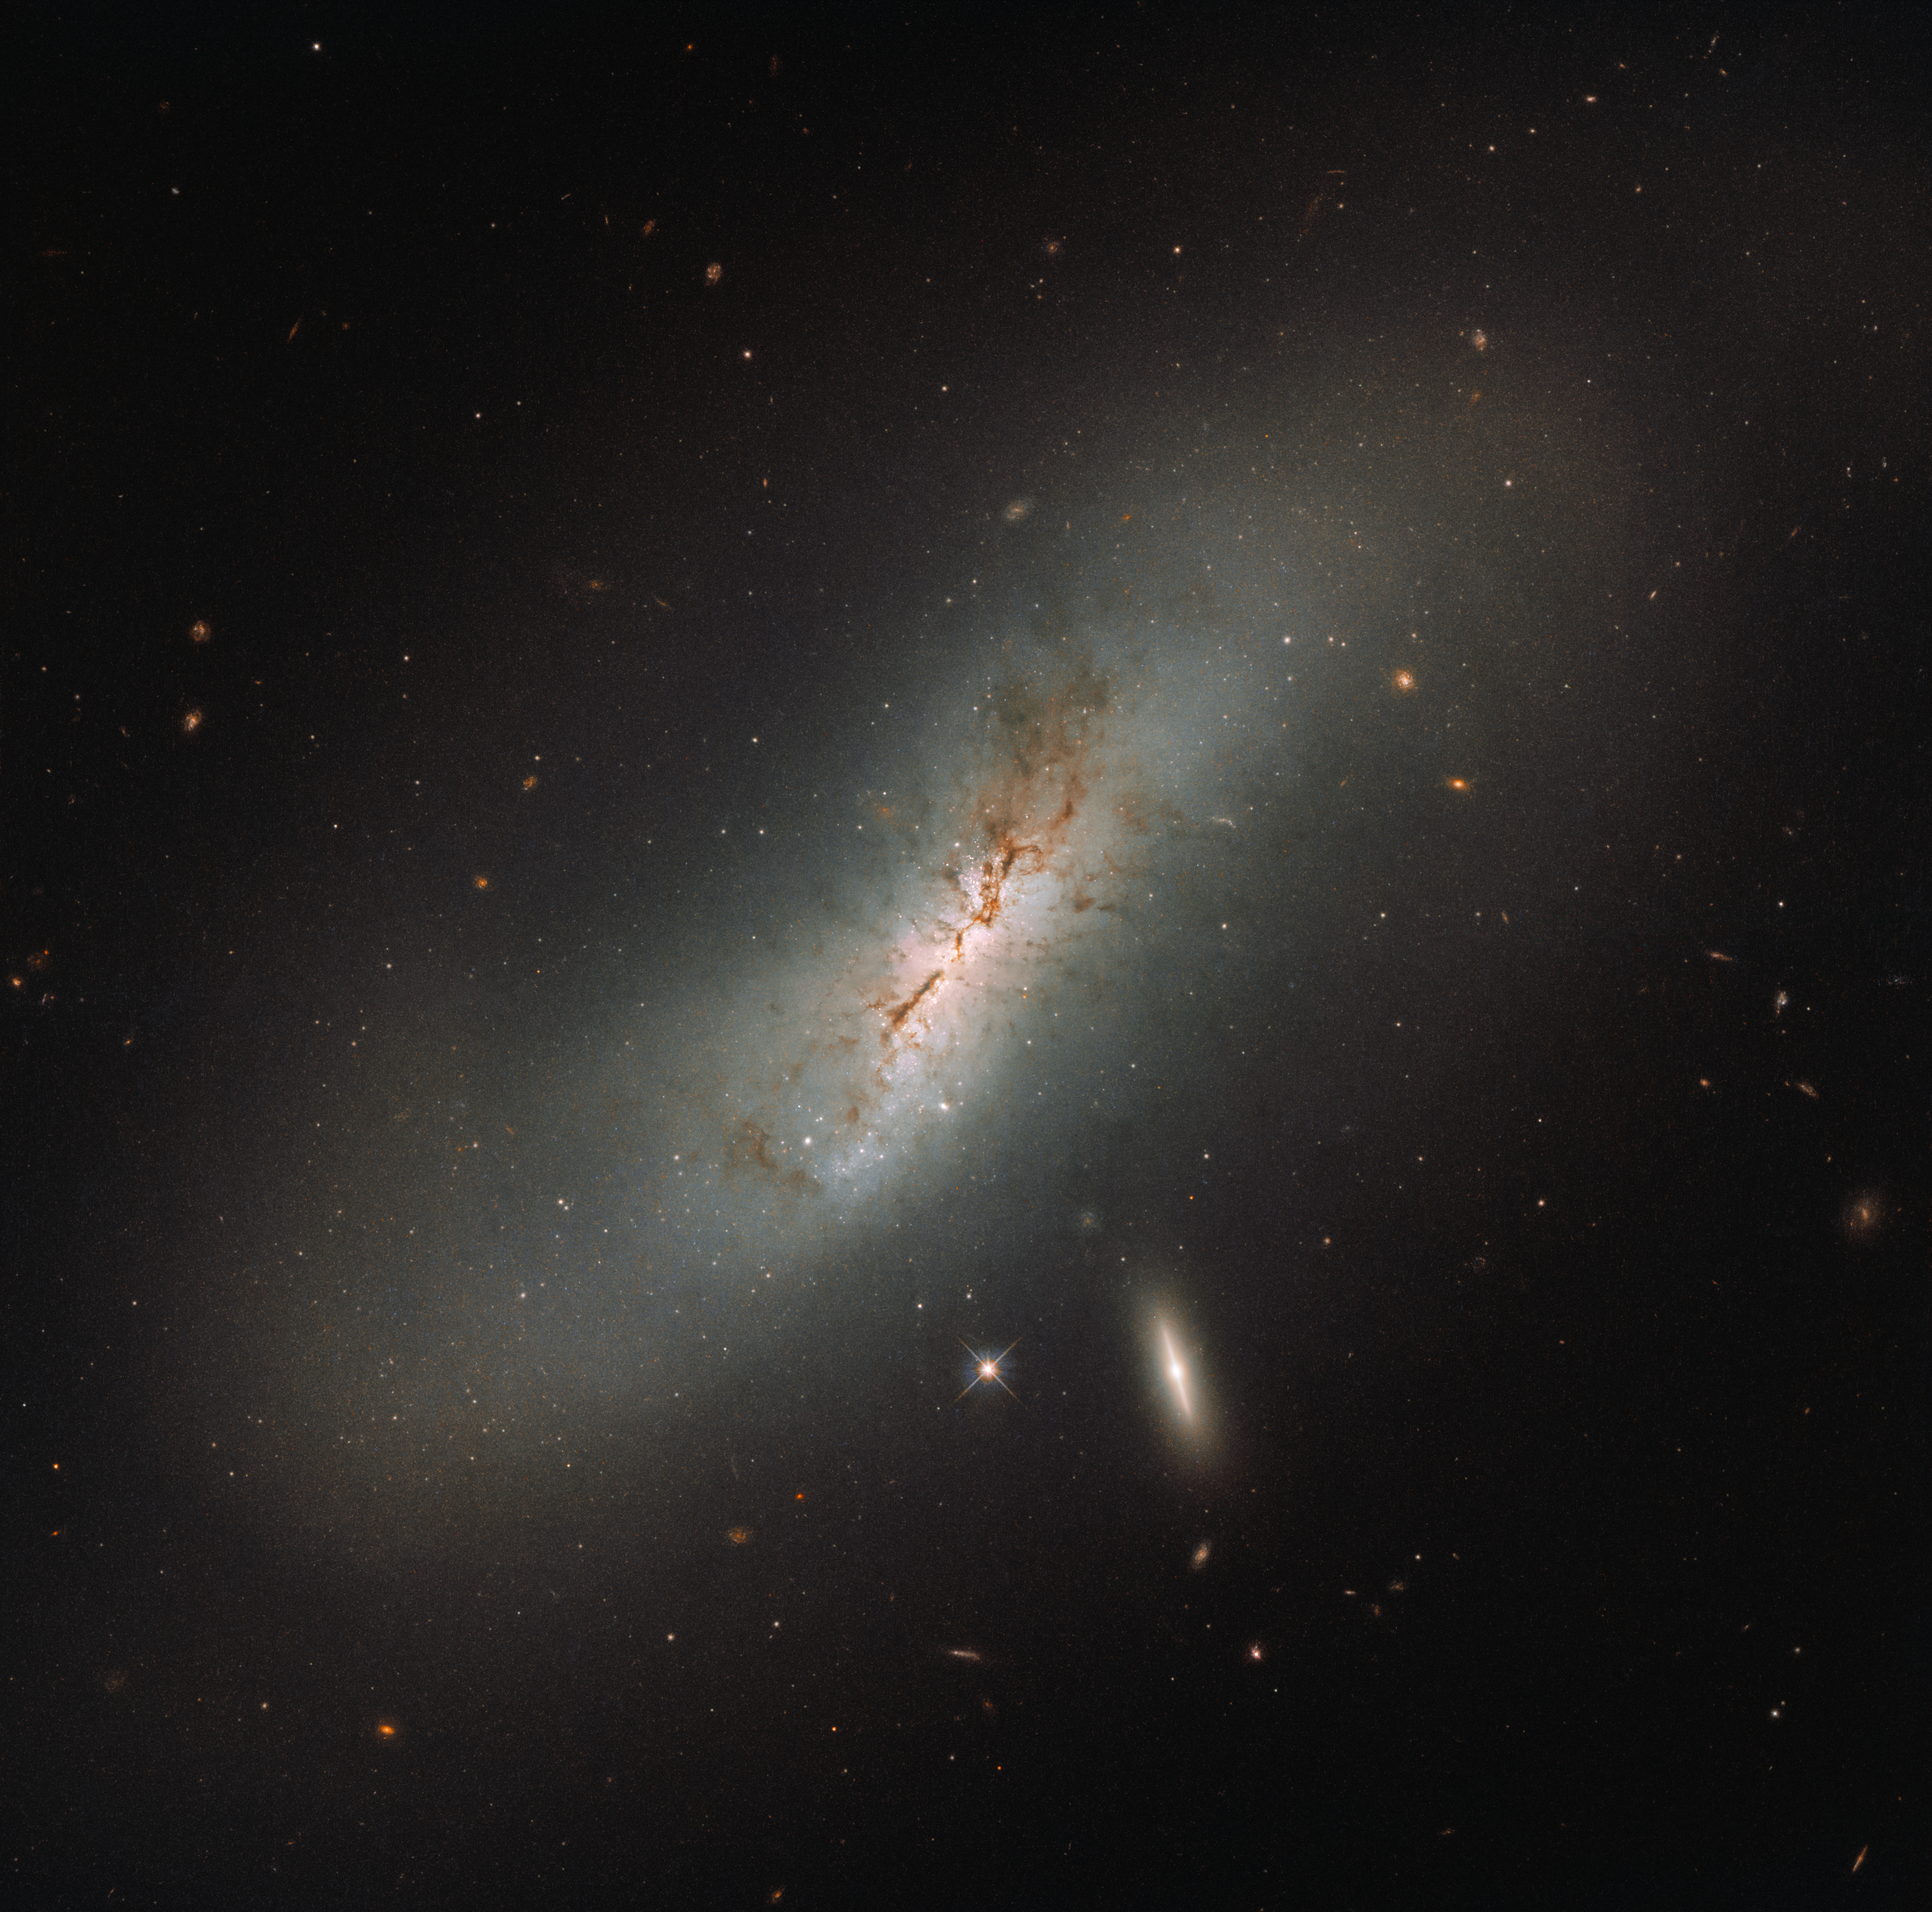

The NGC and its modern counterpart

Some astronomical objects have endearing or quirky nicknames, inspired by mythology or their own appearance. Take, for example, the constellation of Orion (The Hunter), the Sombrero Galaxy, the Horsehead Nebula, or even the Milky Way. However, the vast majority of cosmic objects appear in astronomical catalogues, and are given rather less poetic names based on the order of their discovery.

Two galaxies are clearly visible in this Hubble image, the larger of which is NGC 4424. This galaxy is catalogued in the New General Catalogue of Nebulae and lusters of Stars (NGC), which was compiled in 1888. The NGC is one of the largest astronomical catalogues, which is why so many Hubble Pictures of the Week feature NGC objects. In total there are 7840 entries in the catalogue and they are also generally the larger, brighter, and more eye-catching objects in the night sky, and hence the ones more easily spotted by early stargazers.

The smaller, flatter, bright galaxy sitting just below NGC 4424 is named LEDA 213994. The Lyon-Meudon Extragalactic Database (LEDA) is far more modern than the NGC. Created in 1983 at the Lyon Observatory it contains millions of objects. However, many NGC objects still go by their initial names simply because they were christened within the NGC first. No astronomer can resist a good acronym, and “LEDA” is more appealing than “the LMED”, perhaps thanks to the old astronomical affinity with mythology when it comes to naming things: Leda was a princess in Ancient Greek mythology.

Credit: ESA/Hubble & NASA